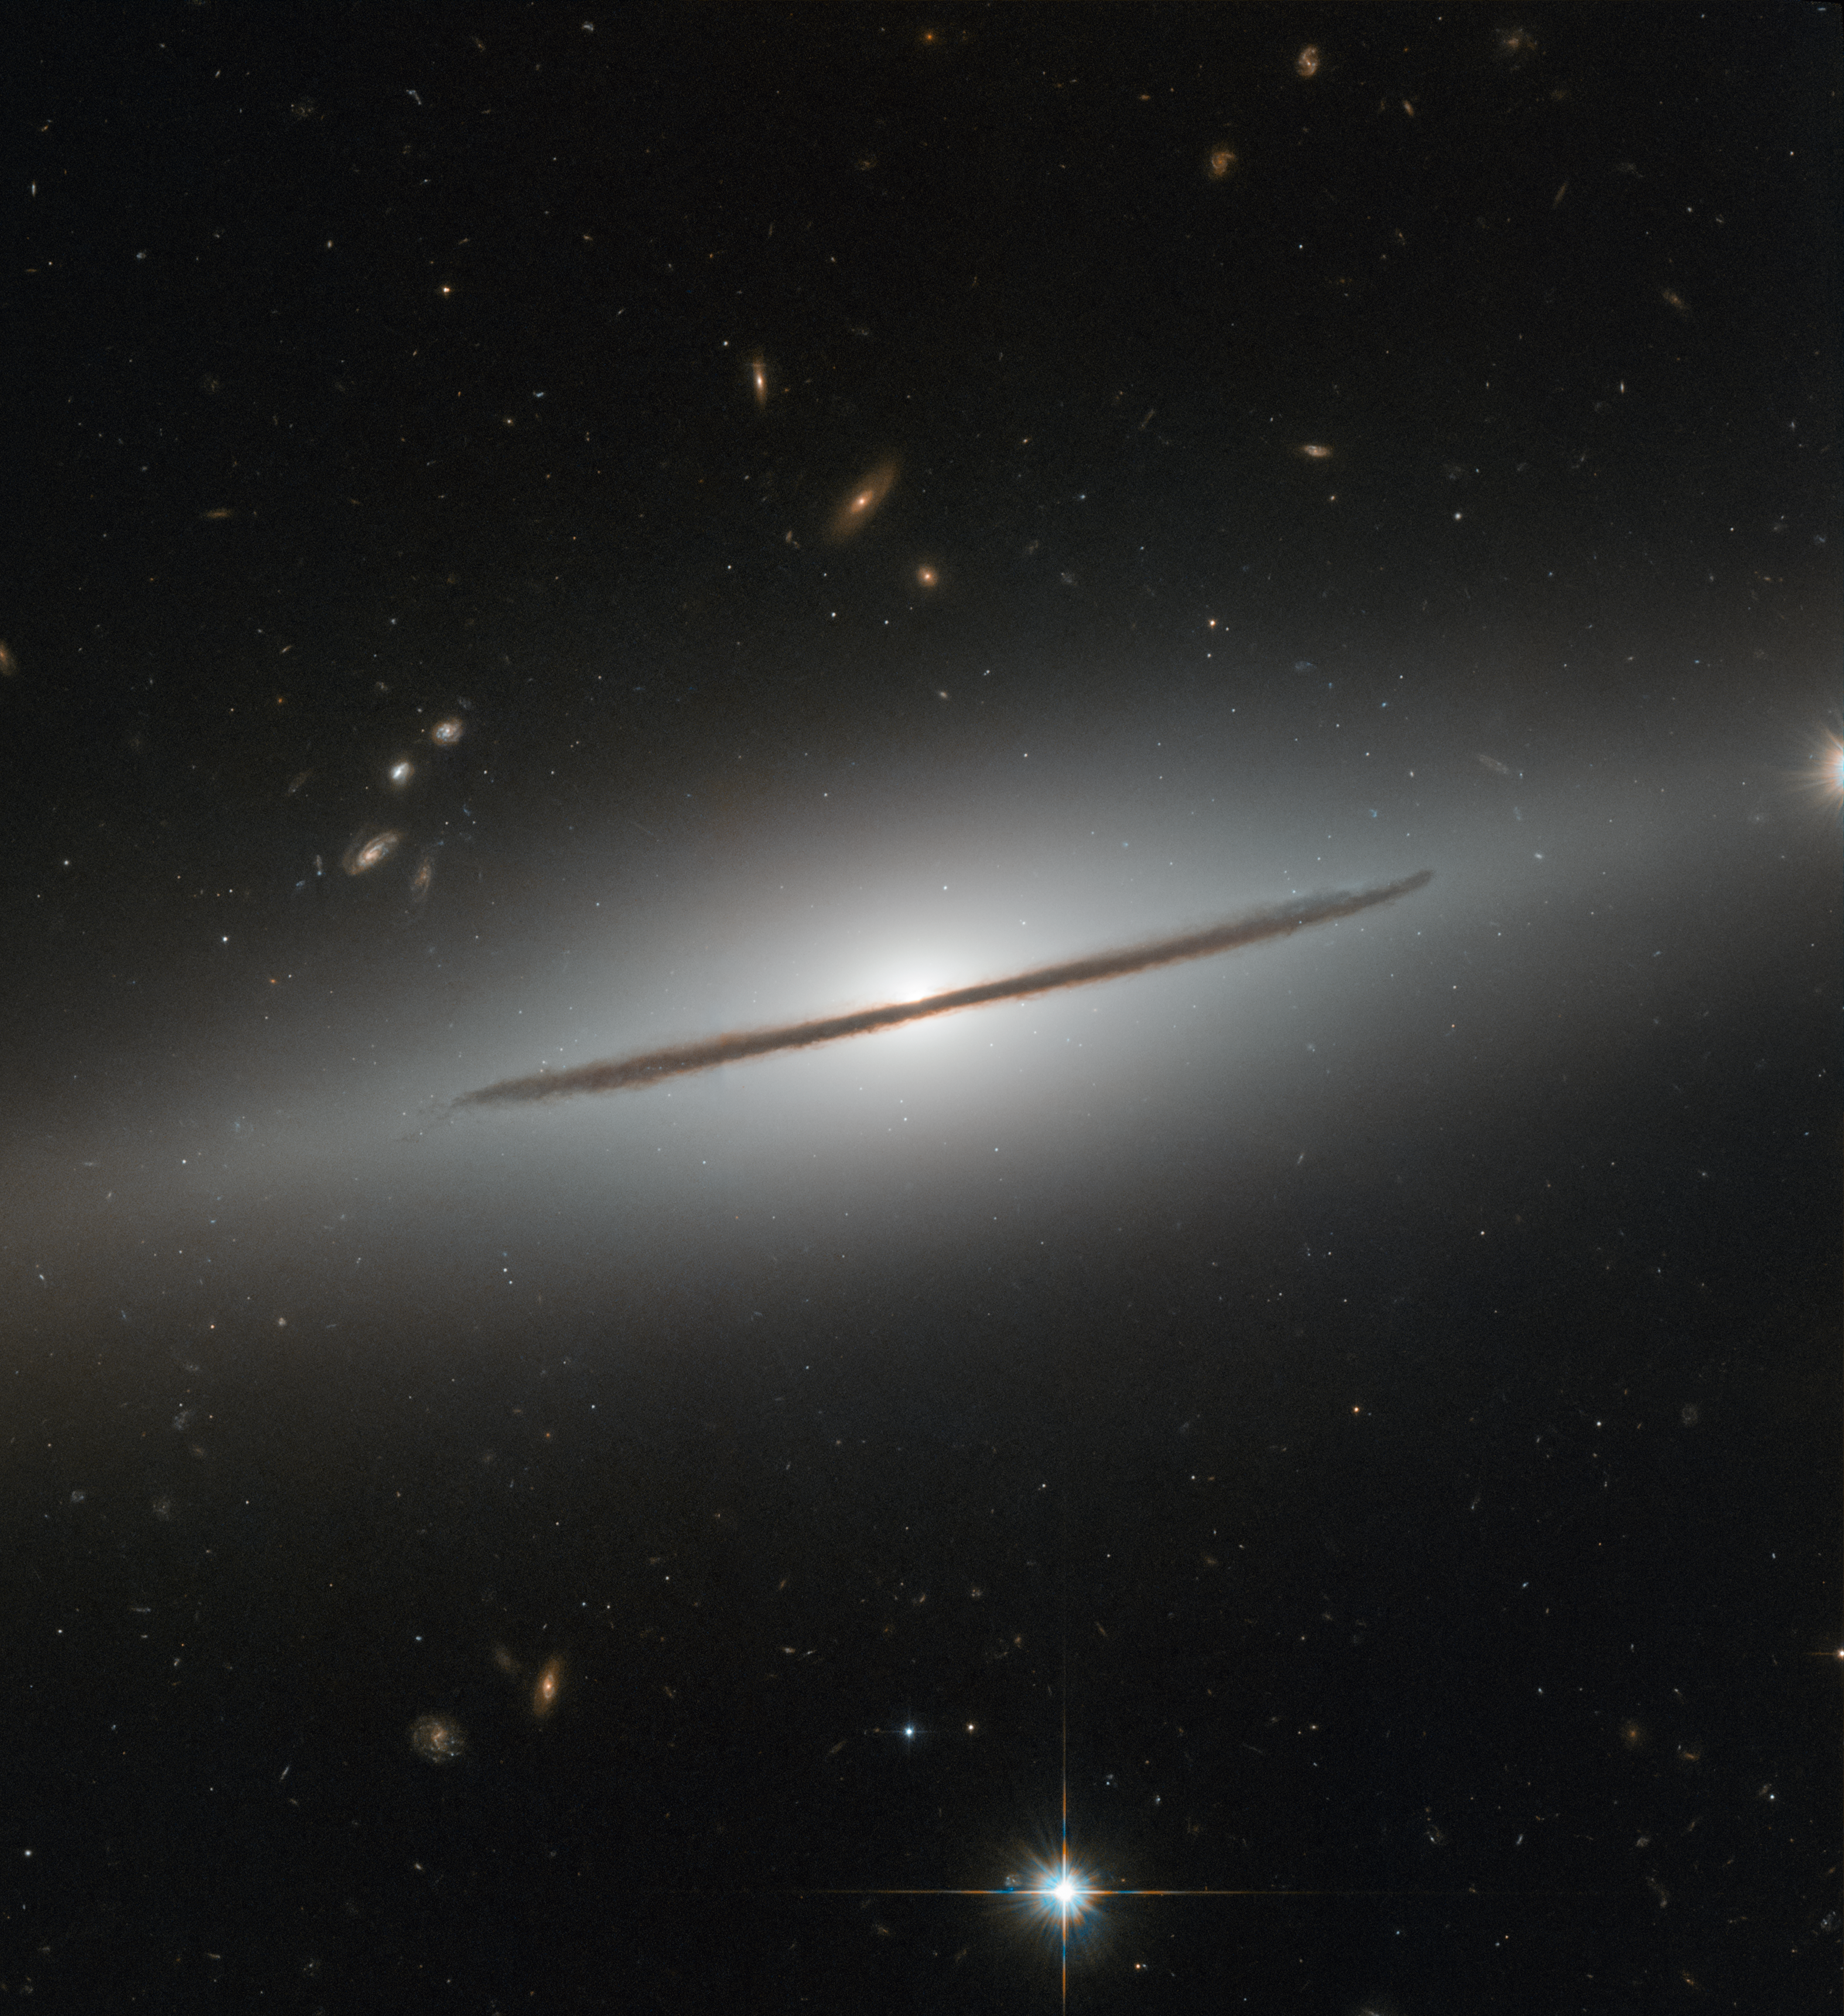

A spiral disguised

Resembling a wizard’s staff set aglow, NGC 1032 cleaves the quiet darkness of space in two in this image from the NASA/ESA Hubble Space Telescope.

NGC 1032 is located about a hundred million light years away in the constellation Cetus (The Sea Monster). Although beautiful, this image perhaps does not do justice to the galaxy’s true aesthetic appeal: NGC 1032 is actually a spectacular spiral galaxy, but from Earth, the galaxy’s vast disc of gas, dust and stars is seen nearly edge-on.

A handful of other galaxies can be seen lurking in the background, scattered around the narrow stripe of NGC 1032. Many are oriented face-on or at tilted angles, showing off their glamorous spiral arms and bright cores. Such orientations provide a wealth of detail about the arms and their nuclei, but fully understanding a galaxy’s three-dimensional structure also requires an edge-on view. This gives astronomers an overall idea of how stars are distributed throughout the galaxy and allows them to measure the “height” of the disc and the bright star-studded core.

Credit: ESA/Hubble & NASA